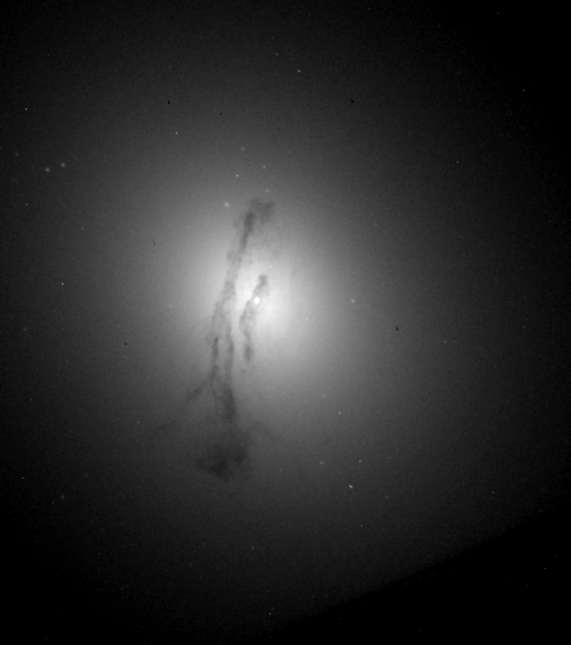

Galaxy M84 Nucleus

This image, taken with Hubble's Wide Field Planetary and Camera 2, shows the core of the galaxy where the suspected black hole dwells. Astronomers mapped the motions of gas in the grip of the black hole's powerful gravitational pull by aligning the STIS's spectroscopic slit across the nucleus in a single exposure.

Credit: Gary Bower, Richard Green (NOAO), the STIS Instrument Definition Team, and NASA/ESA